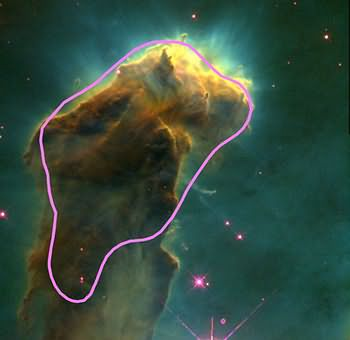

Eagle Nebula with a representation of a giant molecular cloud

Shown here HST image of Eagle Nebula with part of its associated GMC. Since molecular hydrogen gas can only be observed by radio technique, contour lines are here used to show where the optically invisible hydrogen gas lies. The manner in which GMCs form stars may strongly depend on environment. In Milky Way, stars form slowly, soon disrupt and disperse molecular gas around them, as seen here in Eagle Nebula. In merging galaxies experiencing vast bursts of star formation, the fate of a GMCs may be quite different. As tenuous gas surrounding these clumps of dense molecular gas heast up, GMCs may get crunched and triggered into rapidly forming stars. The process may be so rapid that the new stars do not have time to disrupt the GMCs before nearly all the gas is used up. The result is that GMCs may turn into rich star clusters that evolve into globular clusters.

Credit: Radio contour - Leo Blitz (UCB), image - Jeff Hester & Paul Scowen (ASU)